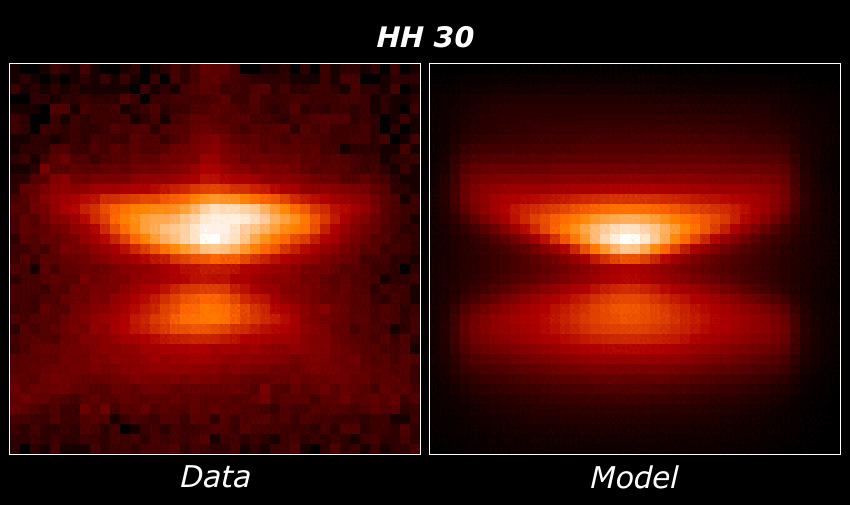

HH 30 model comparison

(Left): The HST/WFPC2 image of the HH 30 disk

(Right): A computer generated image of the disk based on a mathematical model of the dust illuminated by the central star.

Credit: Chris Burrows (STScI) and the WFPC2 Science Team